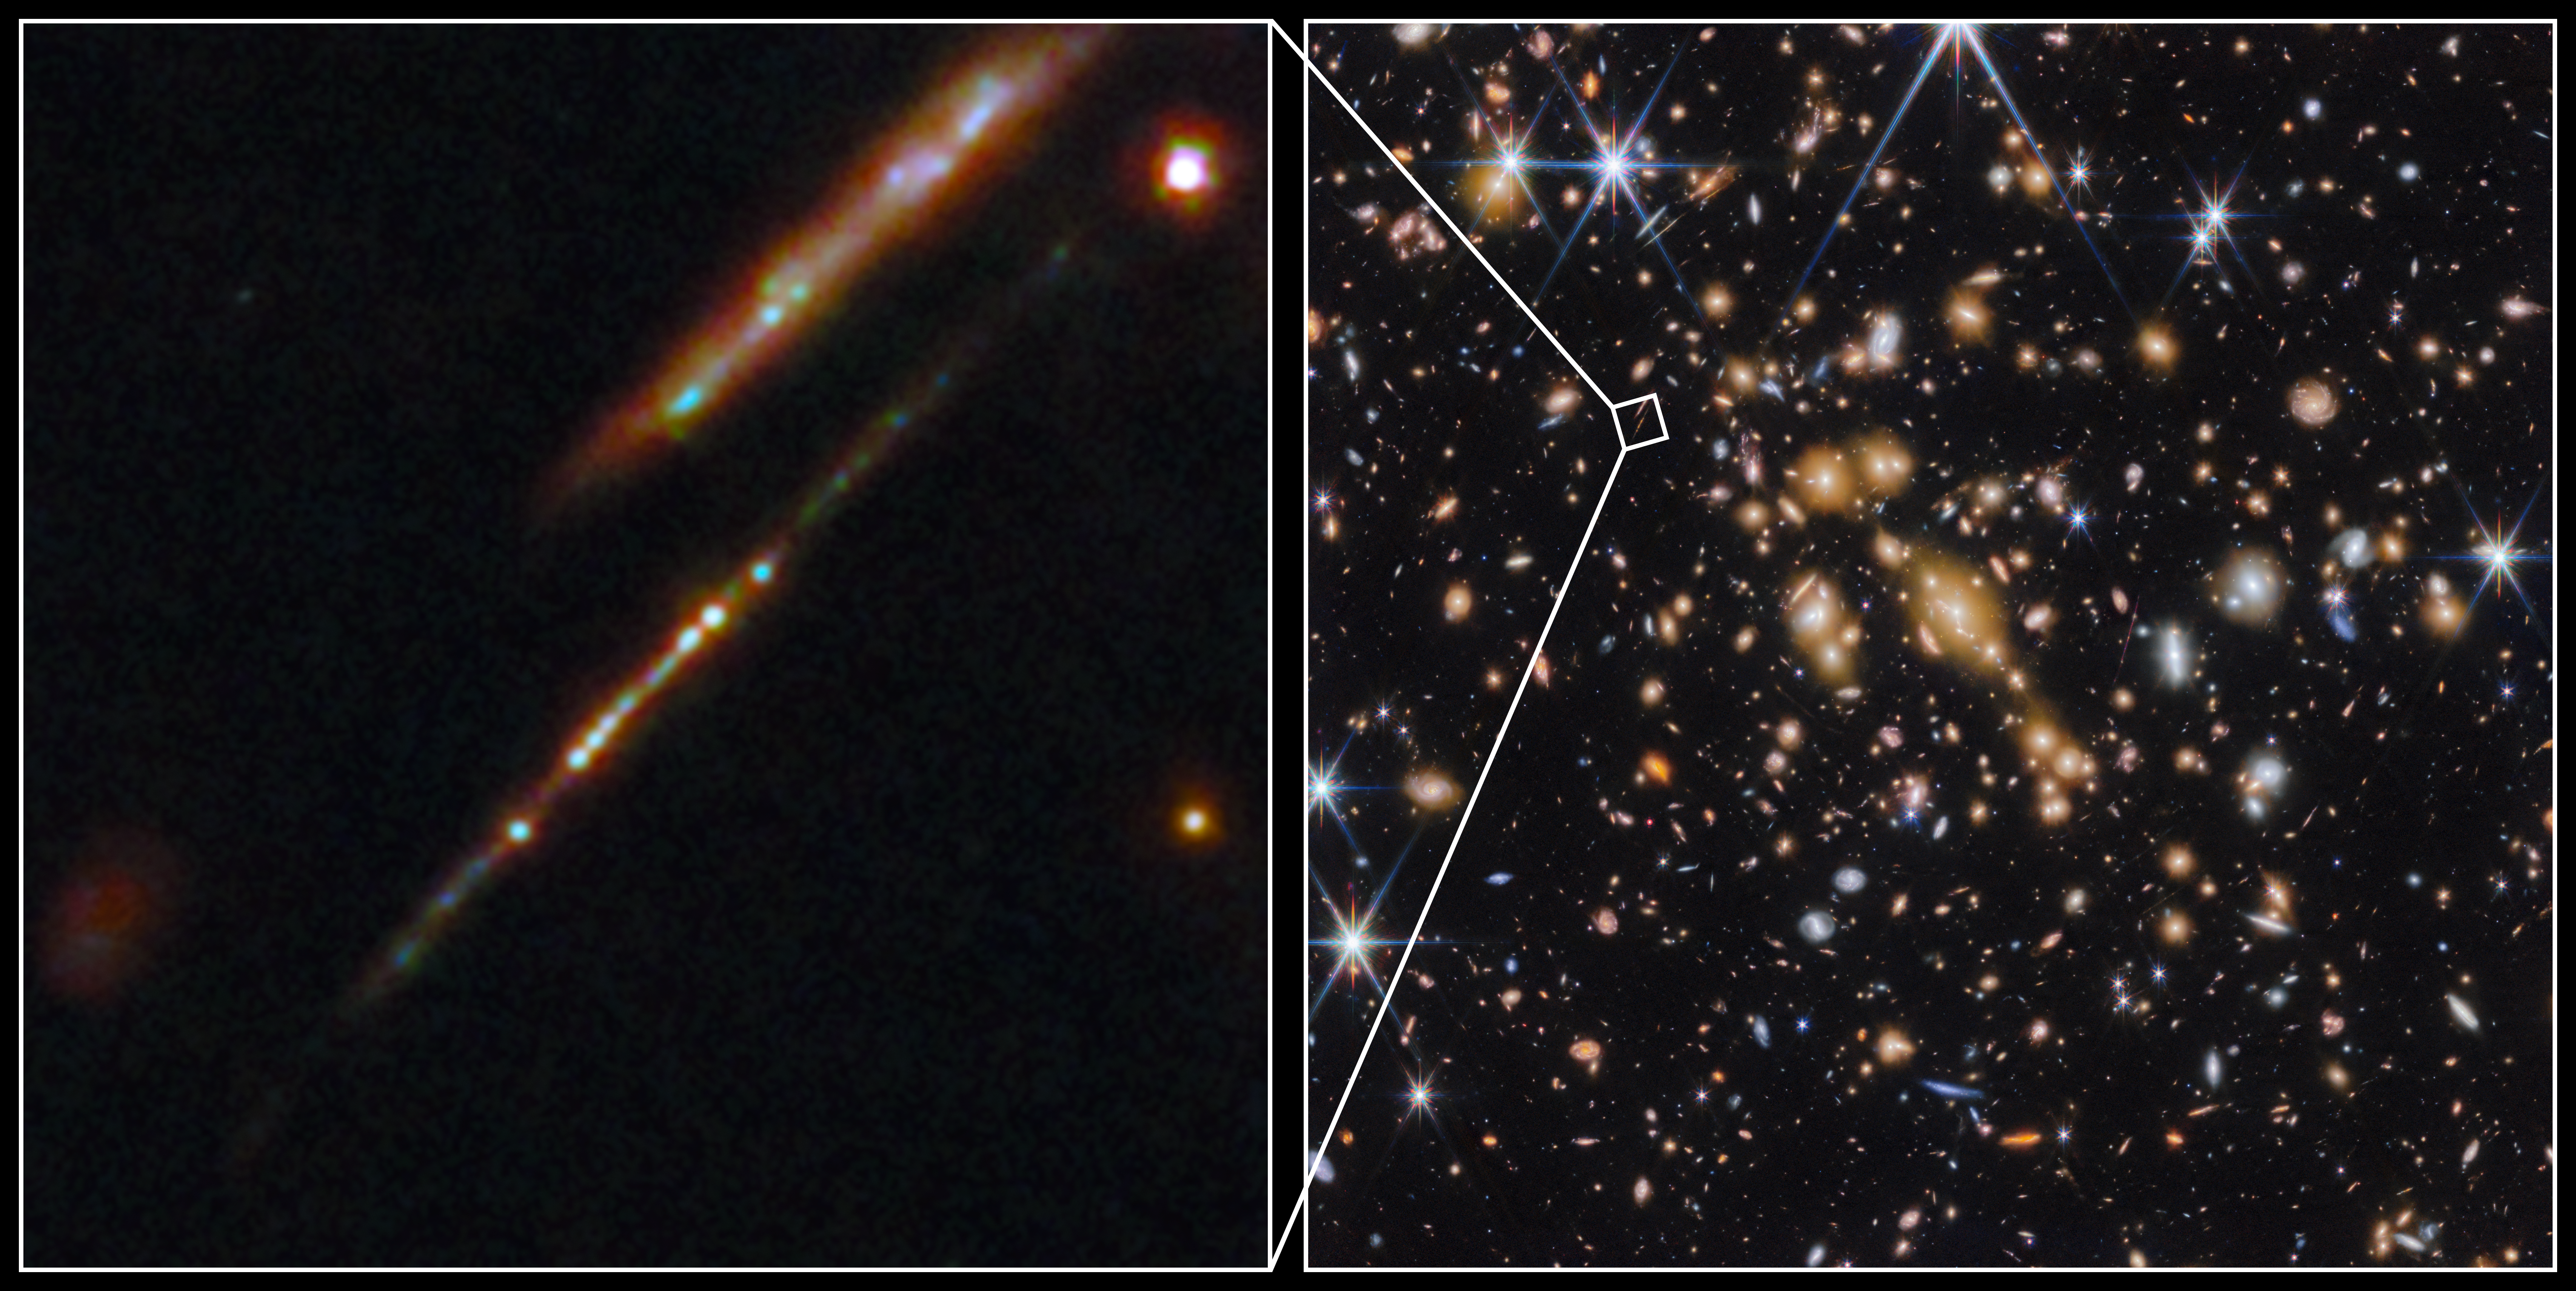

Star clusters in the Cosmic Gems arc

An international team of astronomers have used the NASA/ESA/CSA James Webb Space Telescope to discover gravitationally bound star clusters when the Universe was 460 million years old. This is the first discovery of star clusters in an infant galaxy less than 500 million years after the Big bang.

Young galaxies in the early Universe underwent significant burst phases of star formation, generating substantial amounts of ionising radiation. However, because of their cosmological distances, direct studies of their stellar content have proven challenging. Using Webb, an international team of astronomers have now detected five young massive star clusters in the Cosmic Gems arc (SPT0615-JD1), a strongly-lensed galaxy emitting light when the Universe was roughly 460 million years old, looking back across 97% of cosmic time.

The Cosmic Gems arc was initially discovered in NASA/ESA Hubble Space Telescope images obtained by the RELICS (Reionization Lensing Cluster Survey) programme of the lensing galaxy cluster SPT-CL J0615−5746.

With Webb, the science team can now see where stars formed and how they are distributed, in a similar way to how the Hubble Space Telescope is used to study local galaxies. Webb’s view provides a unique opportunity to study star formation and the inner workings of infant galaxies at such an unprecedented distance.

Credit: ESA/Webb, NASA & CSA, L. Bradley (STScI), A. Adamo (Stockholm University) and the Cosmic Spring collaboration